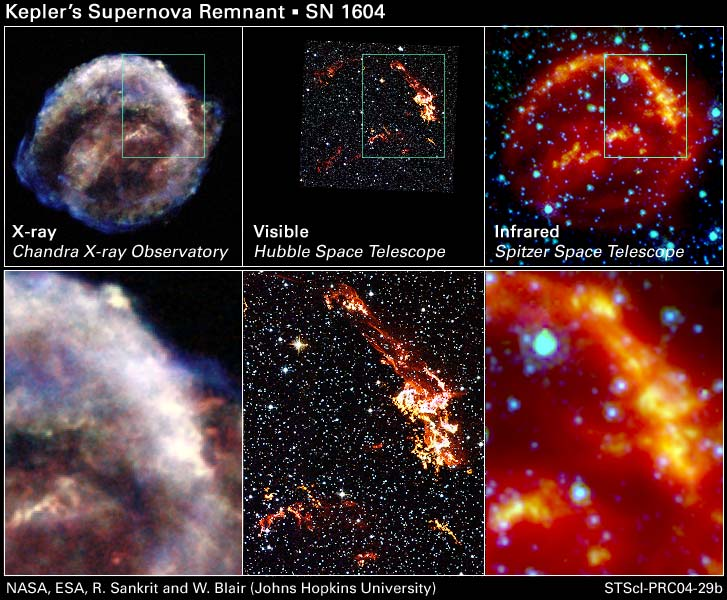

Kepler's Supernova Remnant: Views from Chandra, Hubble, and Spitzer

These images represent views of Kepler's supernova remnant taken in X-rays, visible light, and infrared radiation.

Each top panel shows the entire remnant. Each colour in this image represents a different region of the electromagnetic spectrum, from X-rays to infrared light. The X-ray and infrared data cannot be seen with the human eye. Astronomers have color-coded those data so they can be seen in these images.

Credit: NASA, ESA, R. Sankrit and W. Blair (Johns Hopkins University)